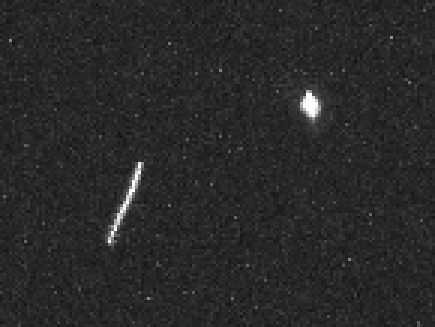

Sedna mystery deepens as Hubble offers best look at farthest planetoid

Hubble took a total of 35 images of Sedna on March 16, 2004. The planetoid appeared to move slightly between exposures, due to the motion of Hubble around Earth and the motion of the Earth around the Sun. Sedna, too, is moving through space, but too slowly for that to be seen in these images. The fact that the object shows this parallax shift between exposures demonstrates that Sedna is a member of the solar system, and hence is far closer to the Earth than the background star (at right) in the same field of view.

Credit: NASA, ESA and M. Brown (Caltech)